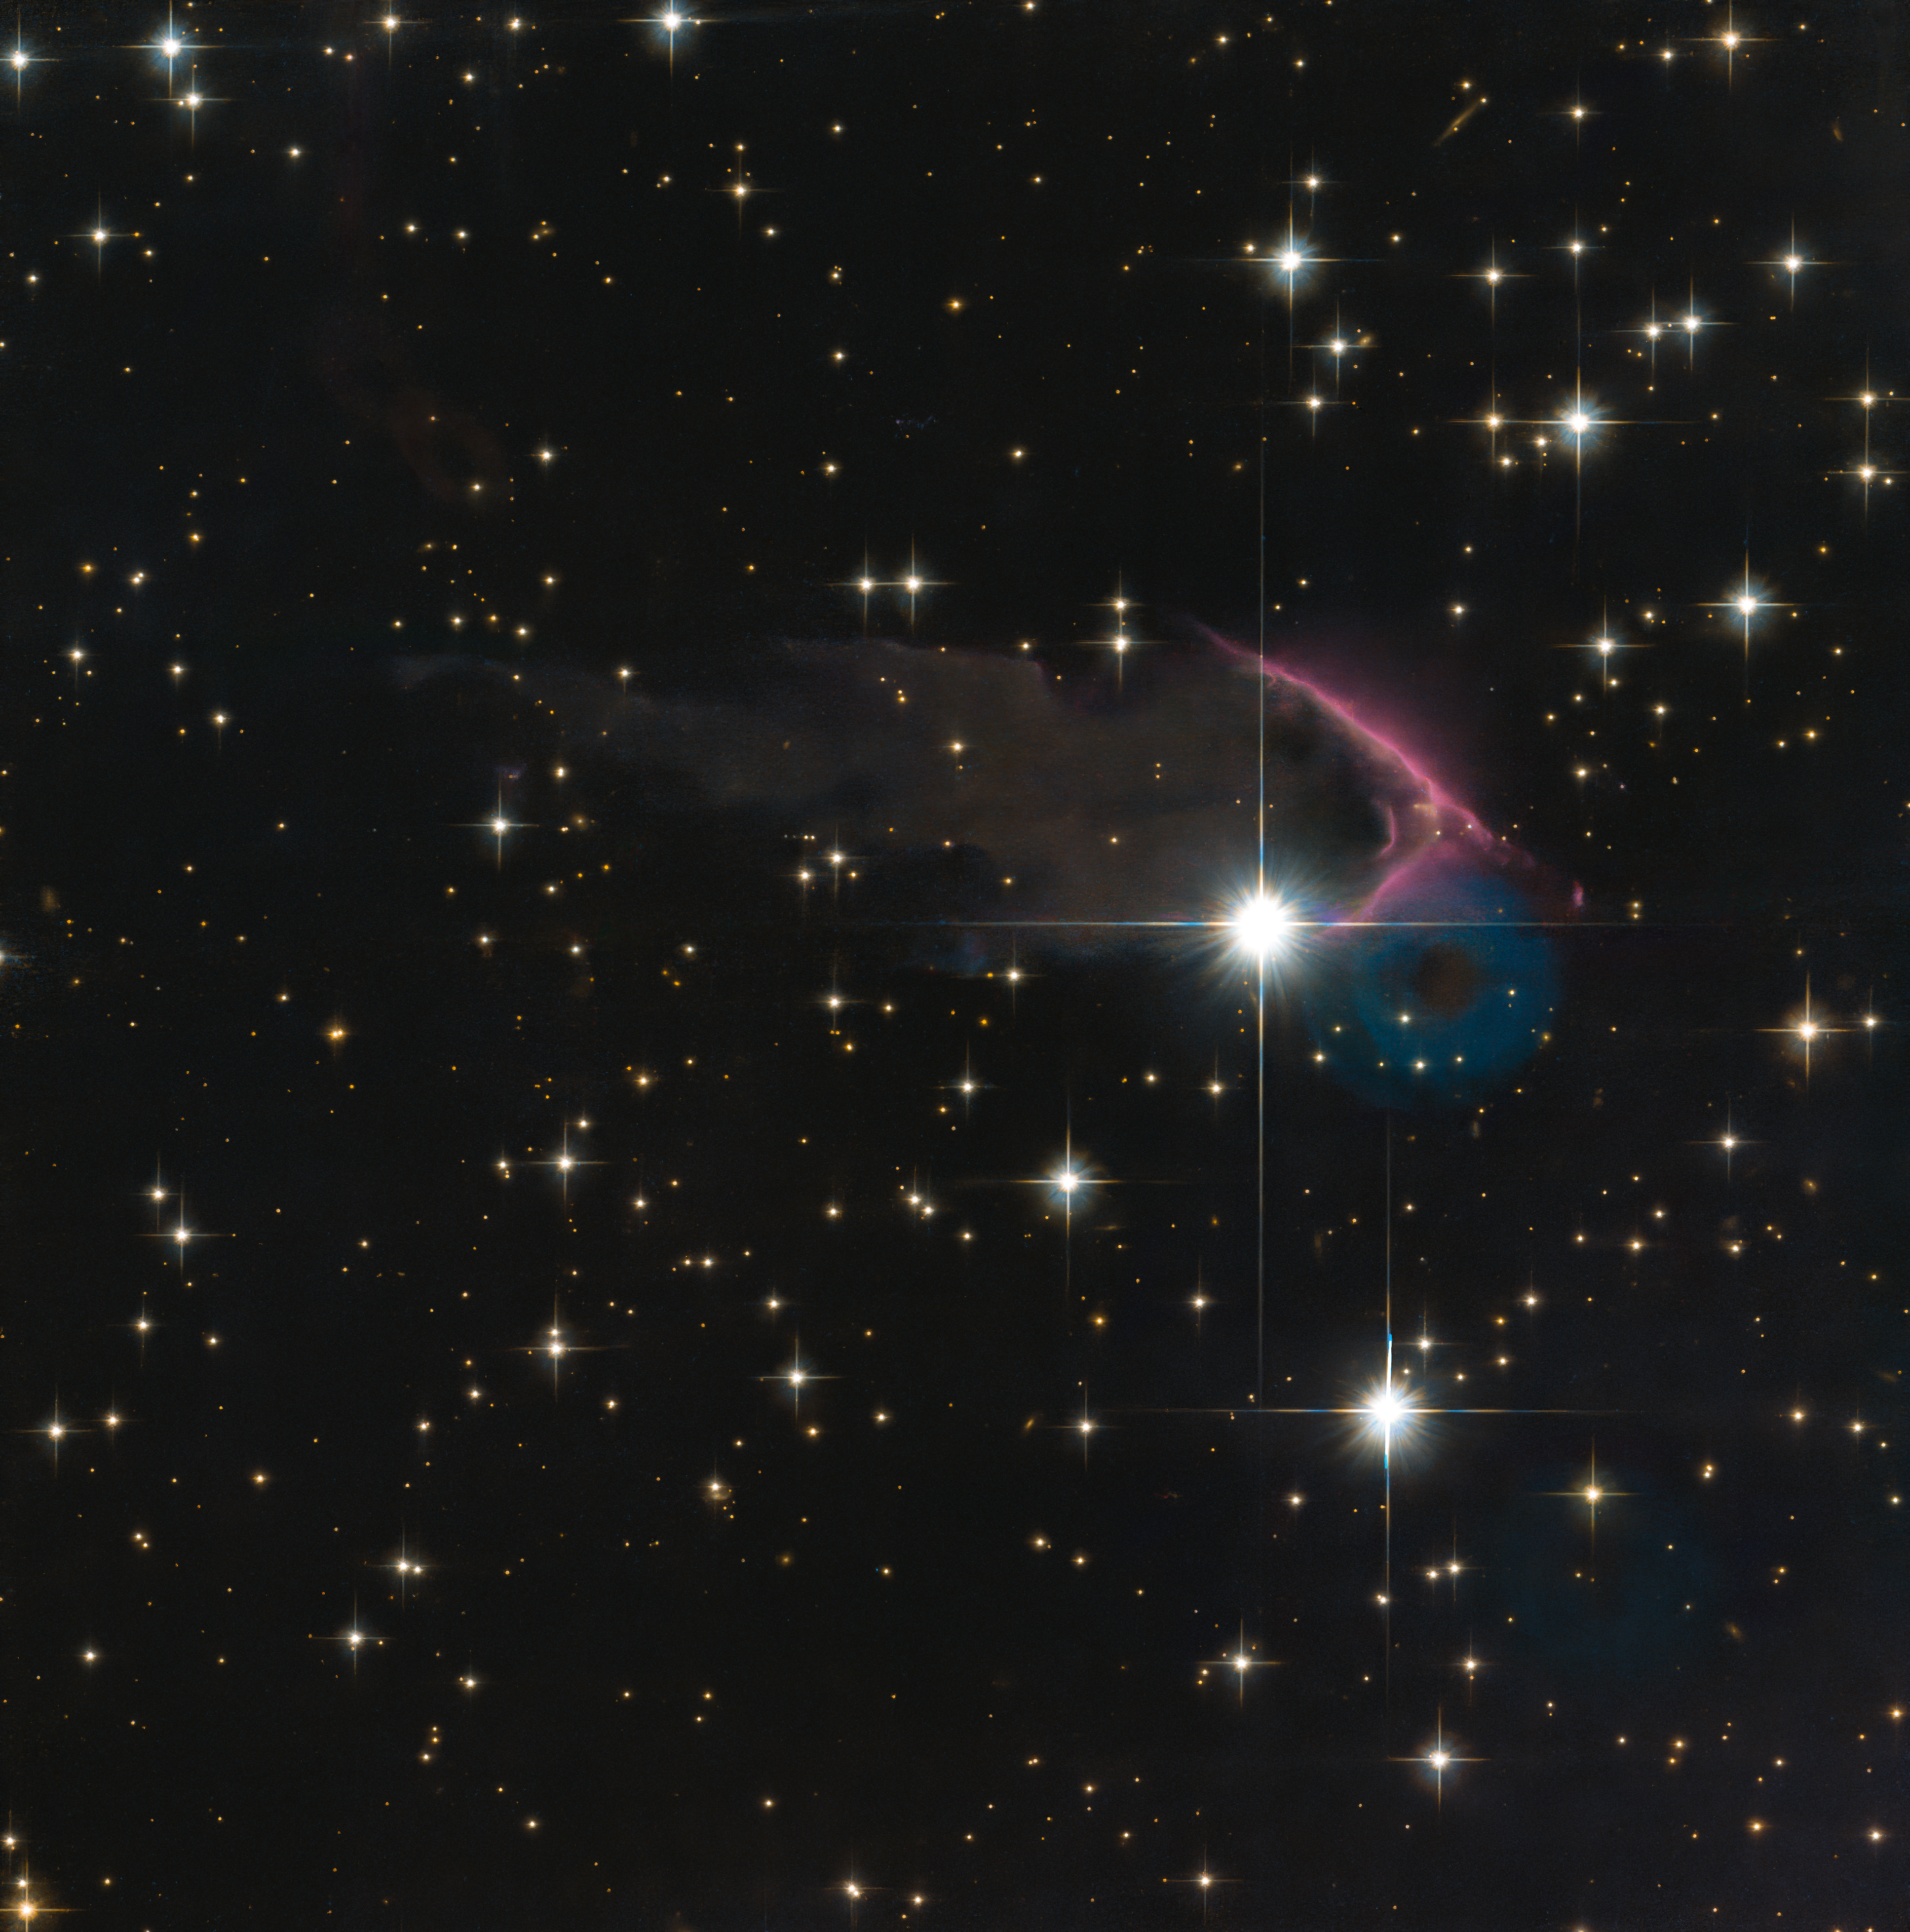

A frEGGs-cellent Discovery

Galaxies are well known as the birthplaces of stars and planets thanks to the overwhelmingly large amount of dust and gas within them. Over time, cold gas coalesces into molecular clouds, leading to the further emergence of star-forming regions.

This image taken with the NASA/ESA Hubble Space Telescope depicts a fantastic new class of star-forming nursery, known as Free-floating Evaporating Gaseous Globules, or frEGGs for short. This object, known as J025027.7+600849, is located in the constellation of Cassiopeia.

When a massive new star (or stars) starts to shine while still within the cool molecular cloud from which it formed, its energetic radiation can ionise the cloud’s hydrogen and create a large, hot bubble of ionised gas. Amazingly, located within this bubble of hot gas around a nearby massive star are the frEGGs: dark compact globules of dust and gas, some of which are also giving birth to low-mass stars. The boundary between the cool, dusty frEGG and hot gas bubble is seen as the glowing purple/blue edges in this fascinating image.

Learning more about these odd objects can help astronomers understand how stars like our Sun form under external influences. In fact, our Sun may have even been born in a frEGG!

Credit: ESA/Hubble & NASA, R. Sahai